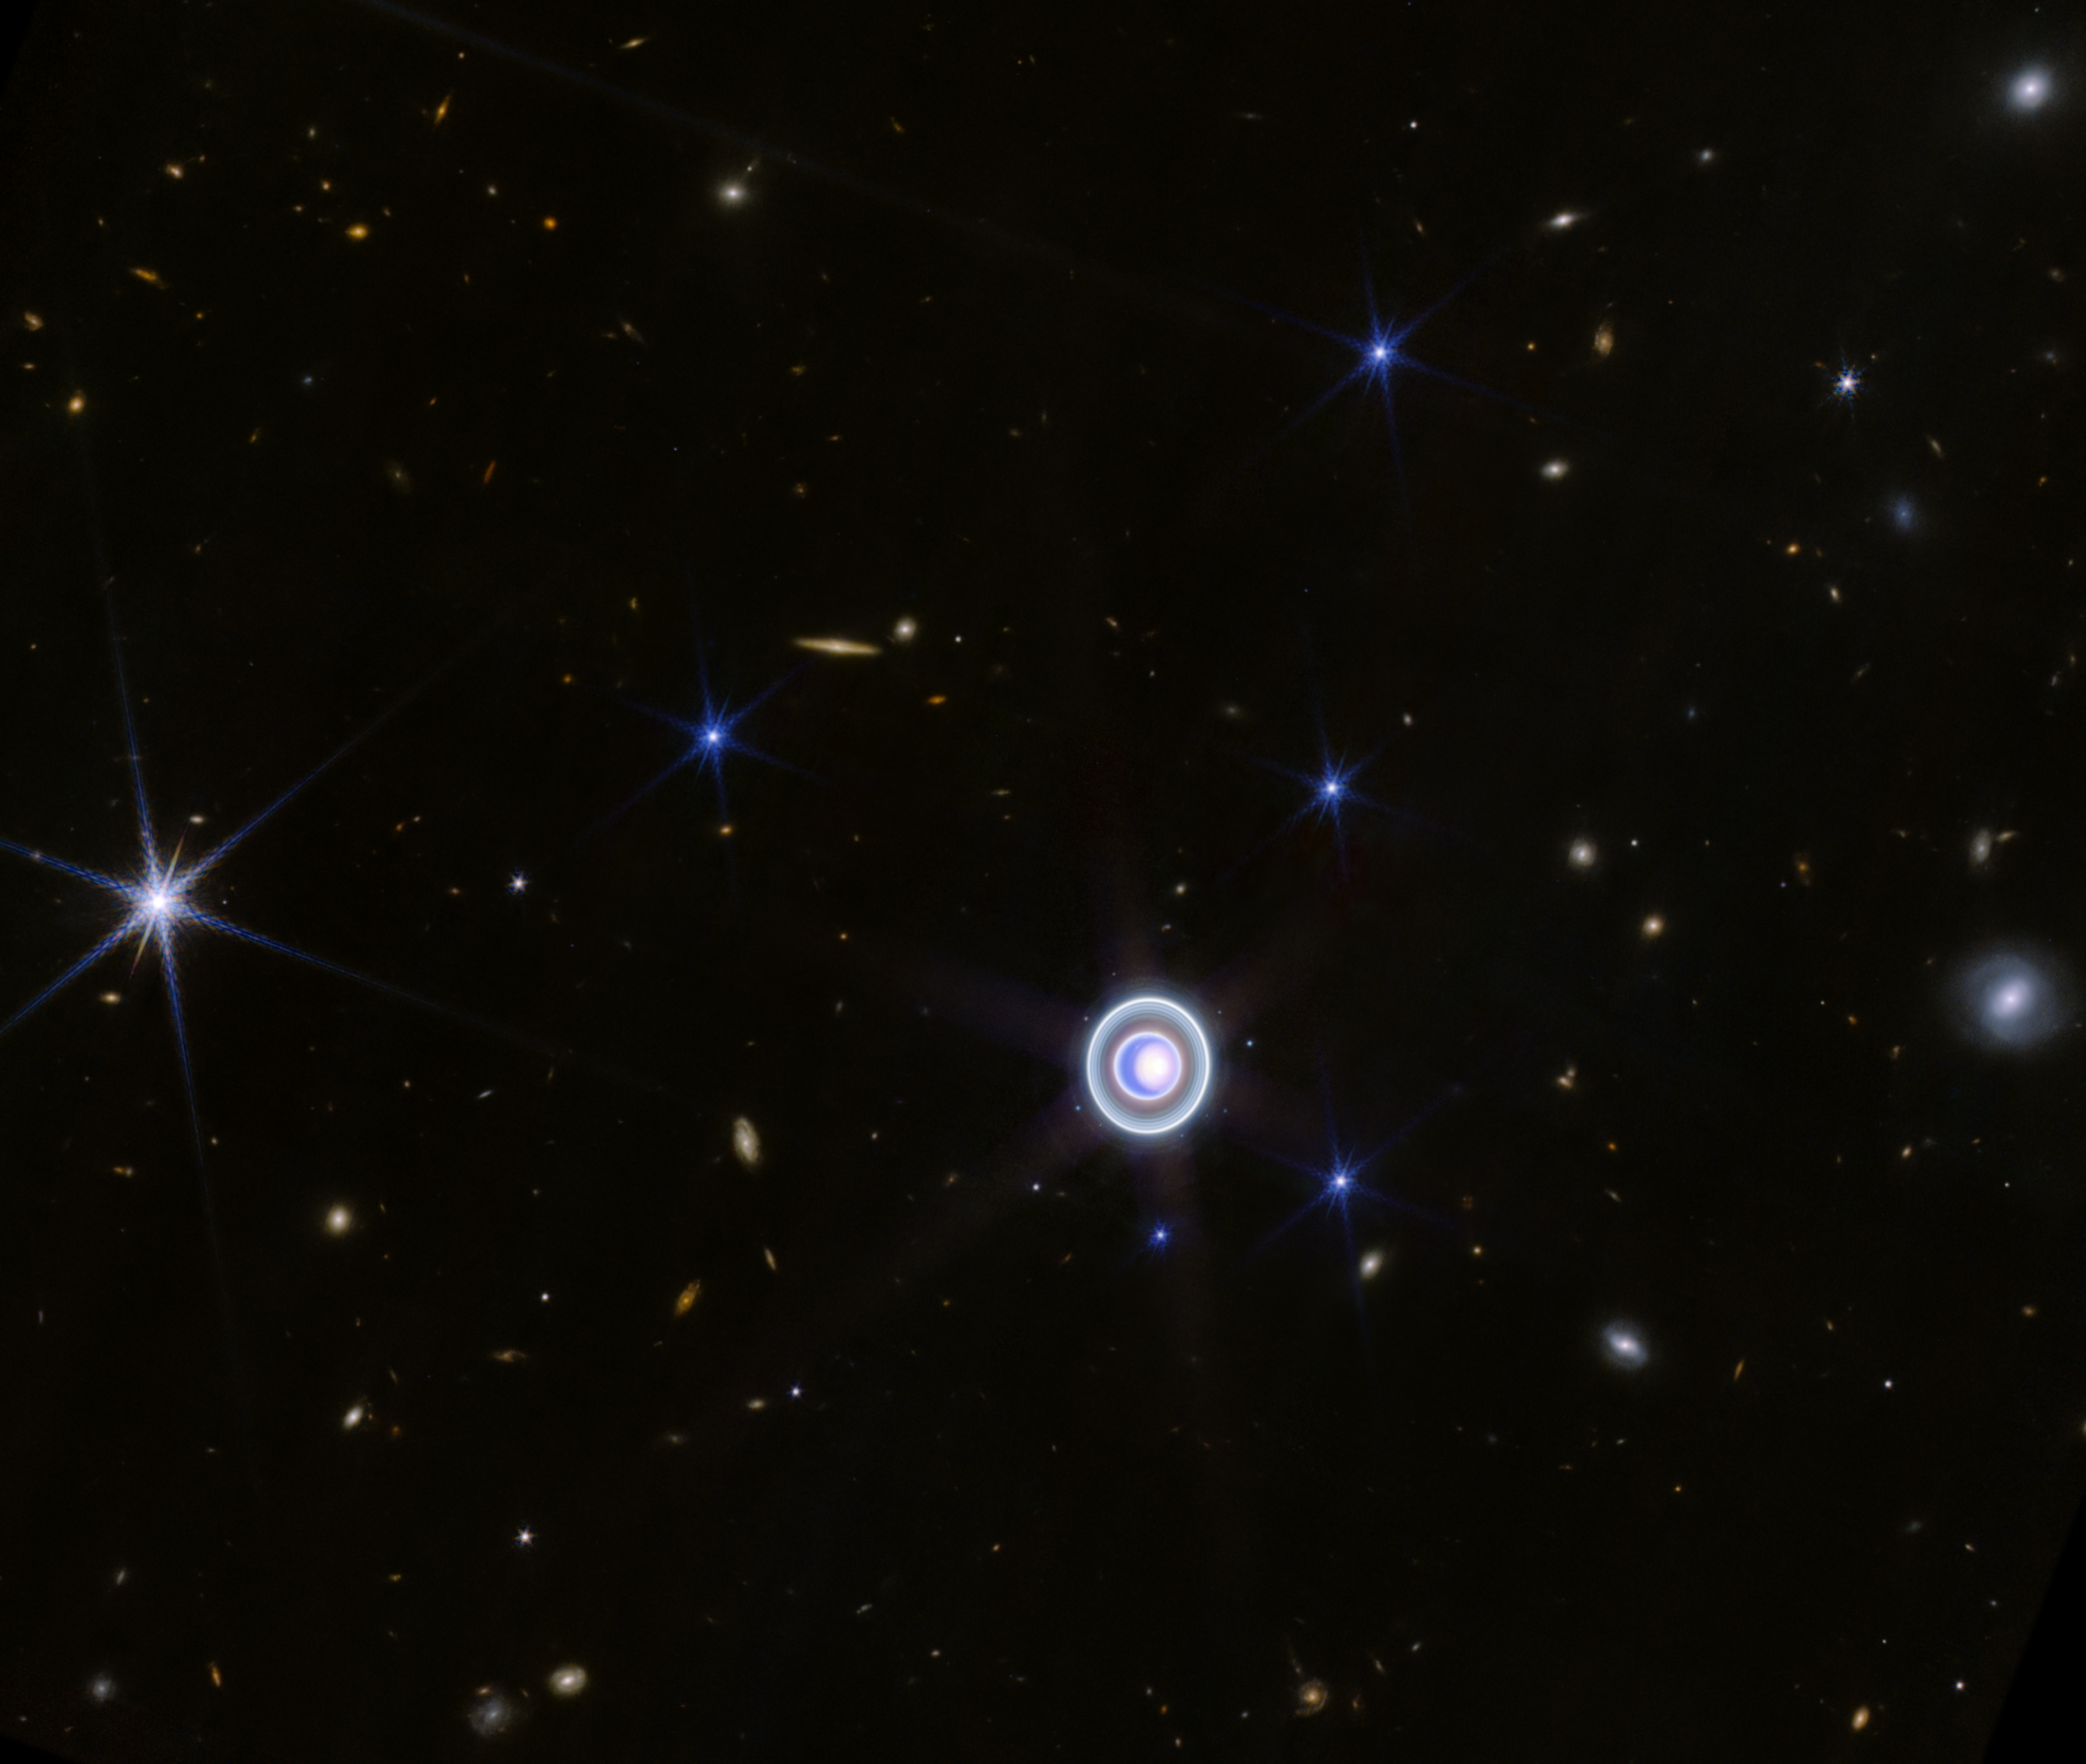

Uranus widefield view (NIRCam)

This image of Uranus from NIRCam (Near-Infrared Camera) on the NASA/ESA/CSA James Webb Space Telescope shows the planet and its rings in new clarity. The planet’s seasonal north polar cap gleams in a bright white, and Webb’s exquisite sensitivity resolves Uranus’ dim inner and outer rings, including the Zeta ring—the extremely faint and diffuse ring closest to the planet.

This Webb image also shows 14 of the planet’s 27 moons: Oberon, Titania, Umbriel, Juliet, Perdita, Rosalind, Puck, Belinda, Desdemona, Cressida, Ariel, Miranda, Bianca, and Portia.

One day on Uranus is about 17 hours, so the planet’s rotation is relatively quick. This makes it supremely difficult for observatories with a sharp eye like Webb to capture one simple image of the entire planet – storms and other atmospheric features, and the planet’s moons, move visibly within minutes. This image combines several longer and shorter exposures of this dynamic system to correct for those slight changes throughout the observing time.

Webb’s extreme sensitivity also picks up a smattering of background galaxies—most appear as orange smudges, and there are two larger, fuzzy white galaxies to the right of the planet in this field of view.

Credit: NASA, ESA, CSA, STScI